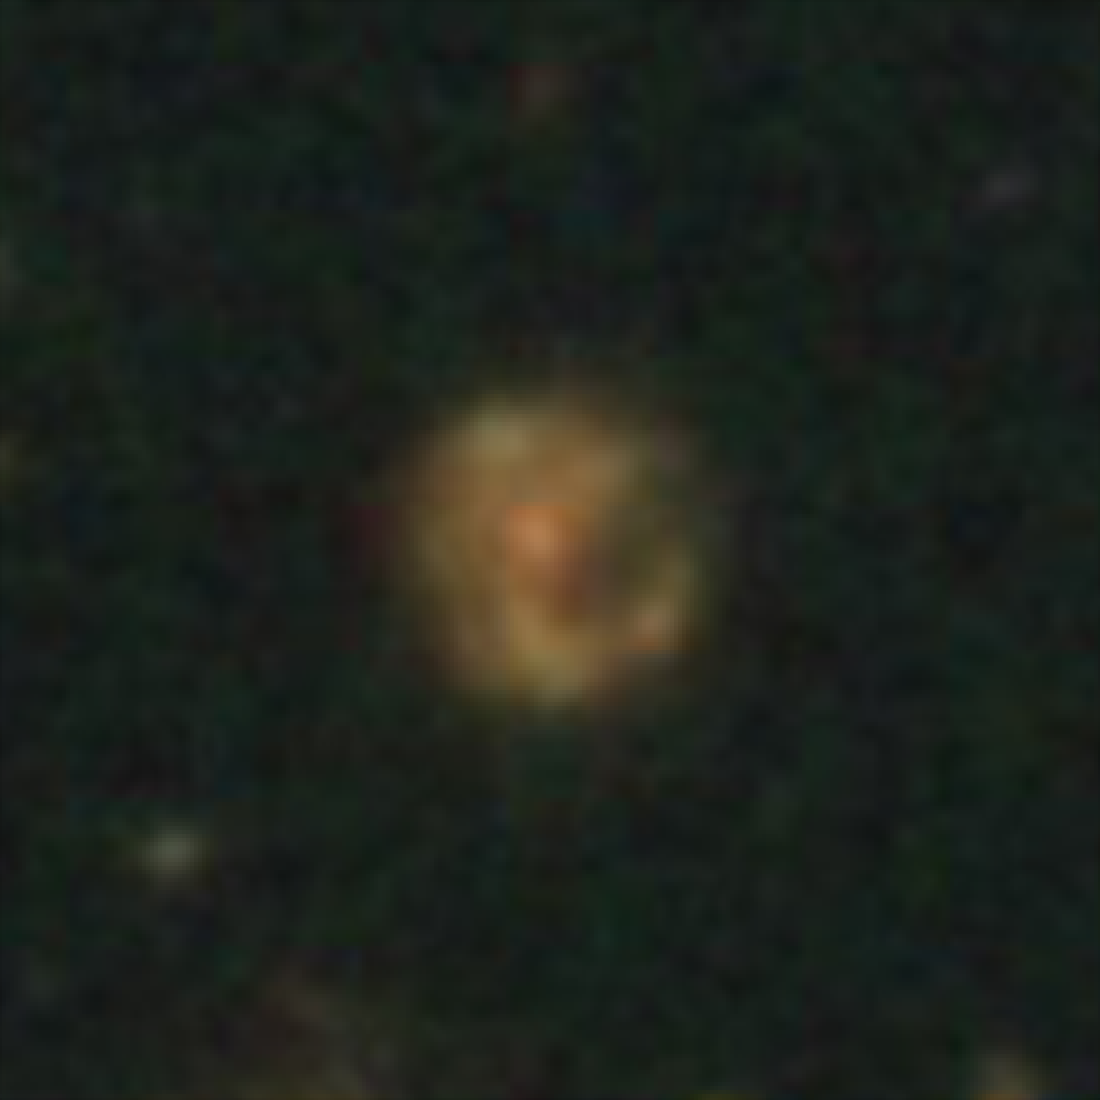

Hubble galaxy at redshift z = 1.3

This image, taken by the NASA/ESA Hubble Space Telescope, shows a galaxy similar in mass to the Milky Way. The galaxy is seen as it was 8.9 billion years ago.

Credit: NASA, ESA, C. Papovich (Texas A&M University), H. Ferguson (STScI), S. Faber (University of California, Santa Cruz), and I. Labbé (Leiden University)